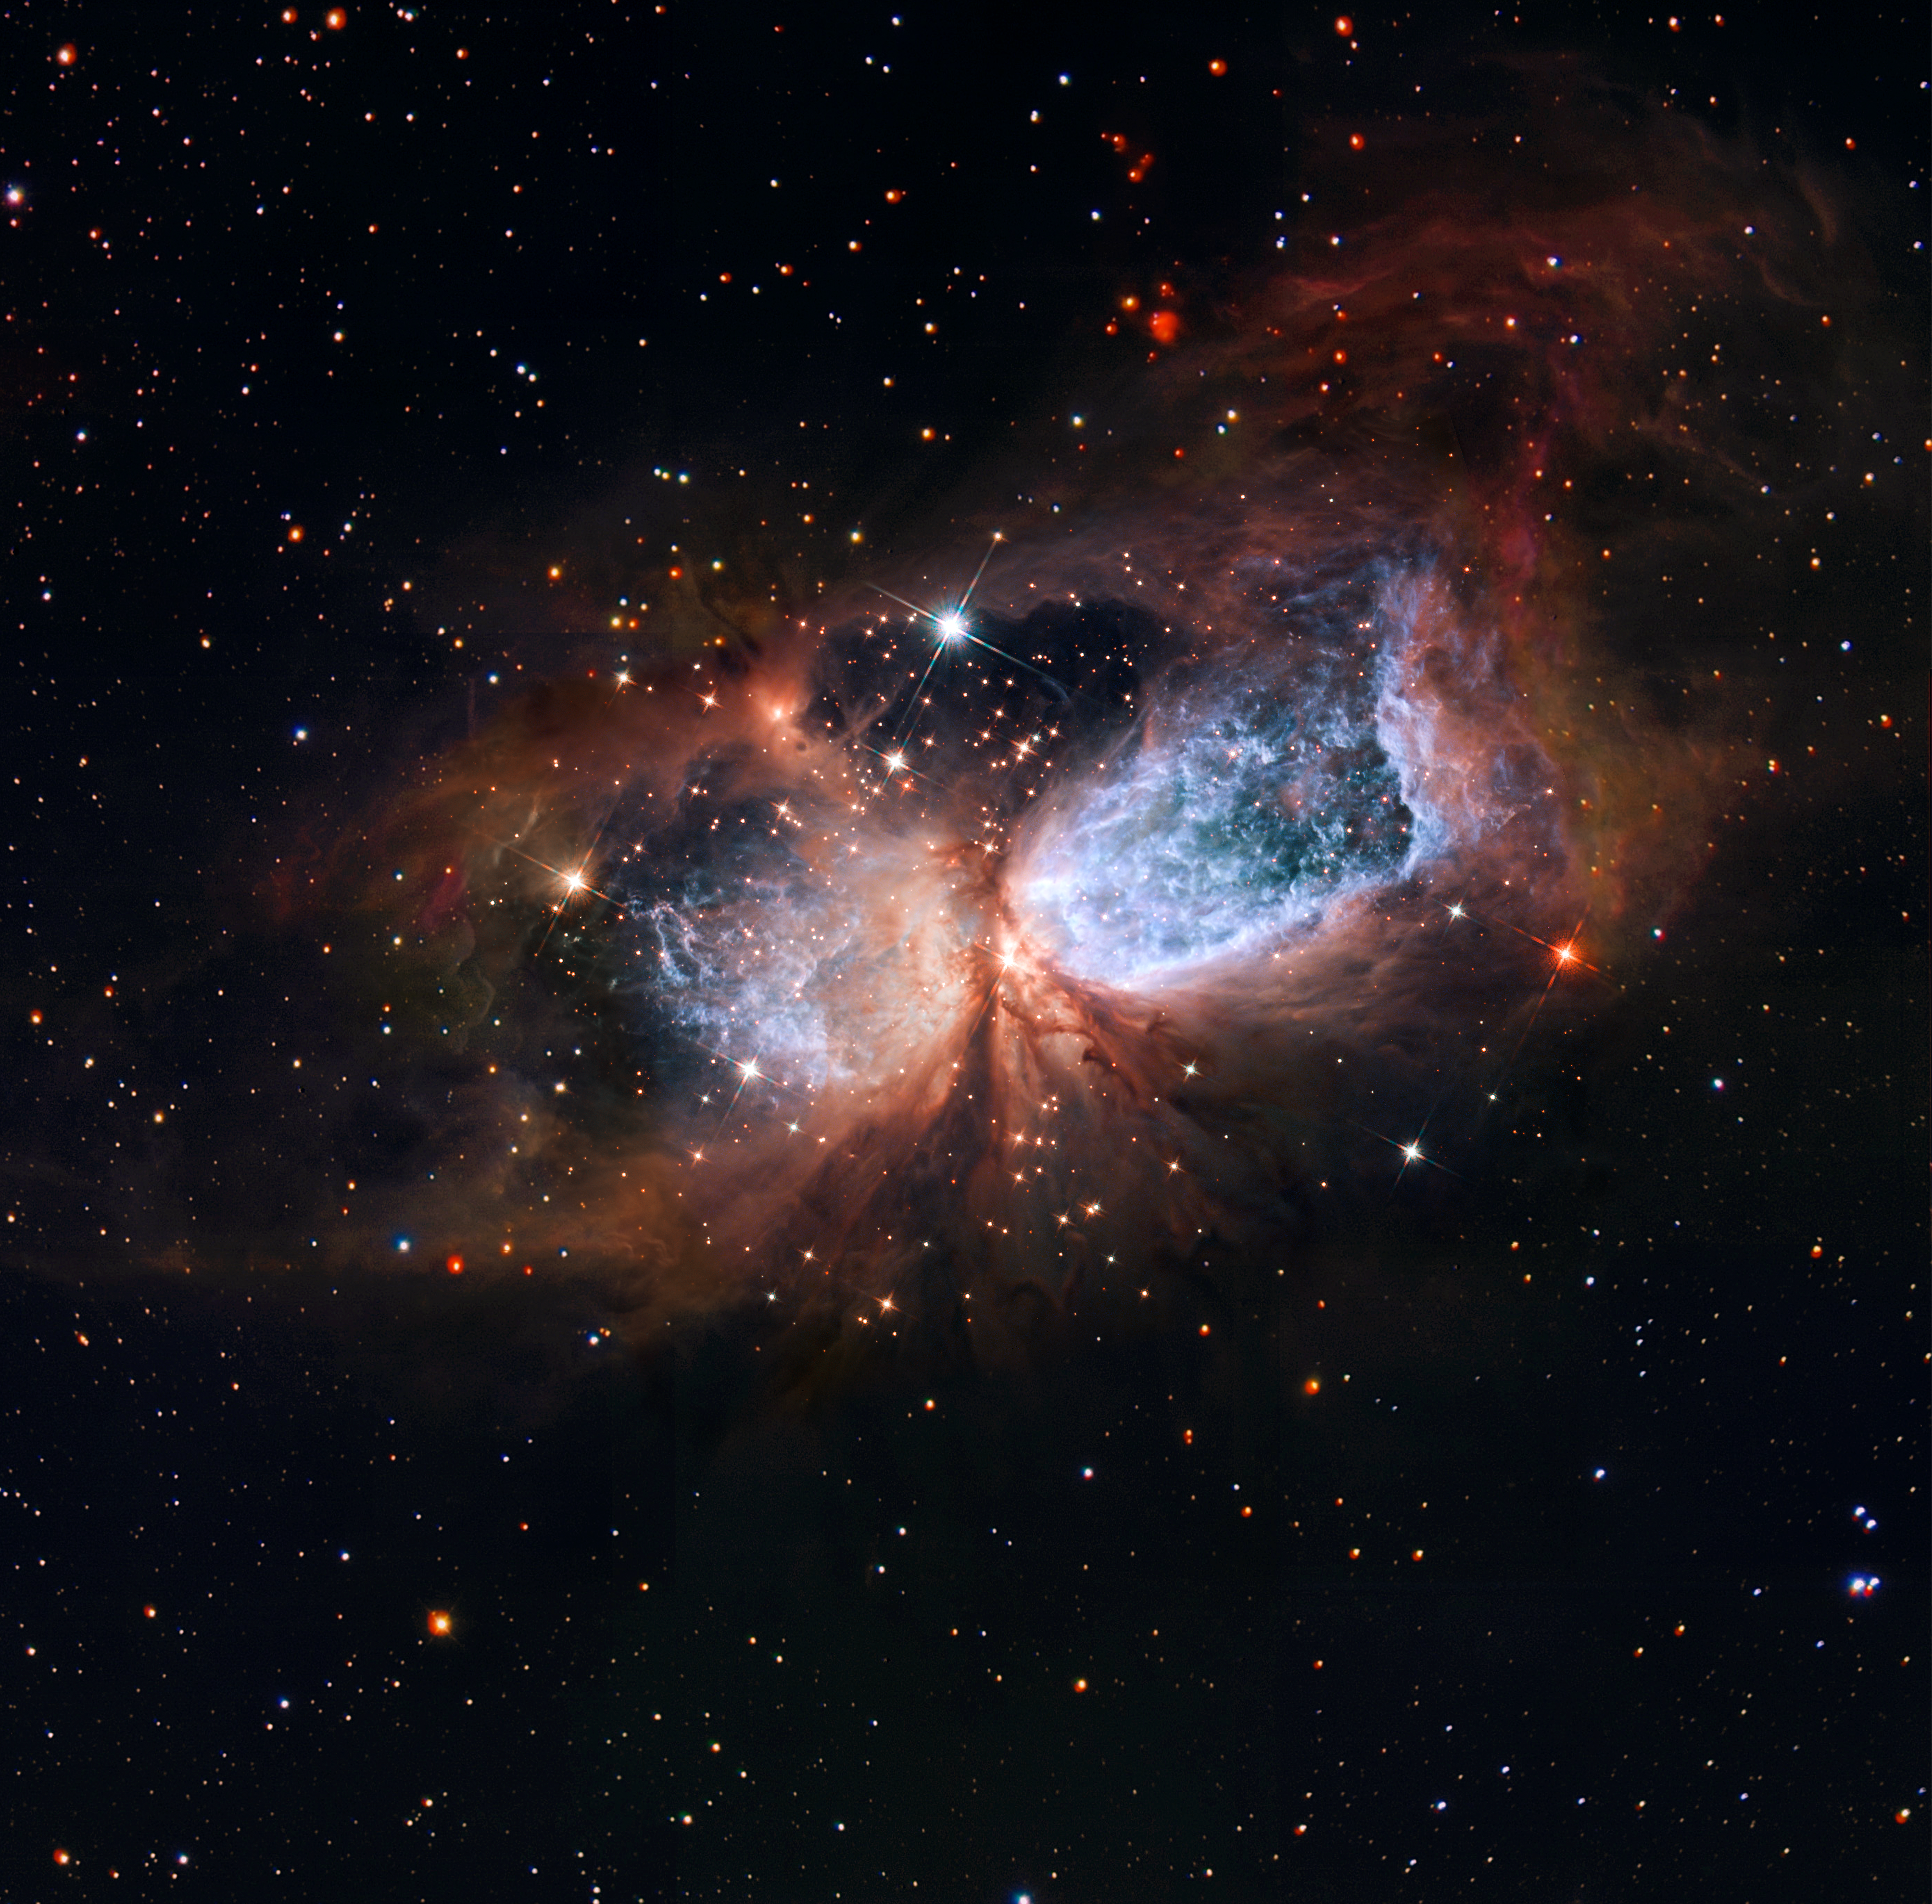

Hubble/Subaru composite of star-forming region S 106

This image shows Sh 2-106, or S106 for short. This is a compact star forming region in the constellation Cygnus (The Swan). A newly-formed star called S106 IR is shrouded in dust at the centre of the image, and is responsible for the surrounding gas cloud’s hourglass-like shape and the turbulence visible within. Light from glowing hydrogen is coloured blue in this image.

The image combines observations from the Hubble Space Telescope (in the centre) with images from the National Astronomical Observatory of Japan’s Subaru Telescope to extend the field of view around the edges of the image.

Credit: NASA, ESA, the Hubble Heritage Team (STScI/AURA) and NAOJ